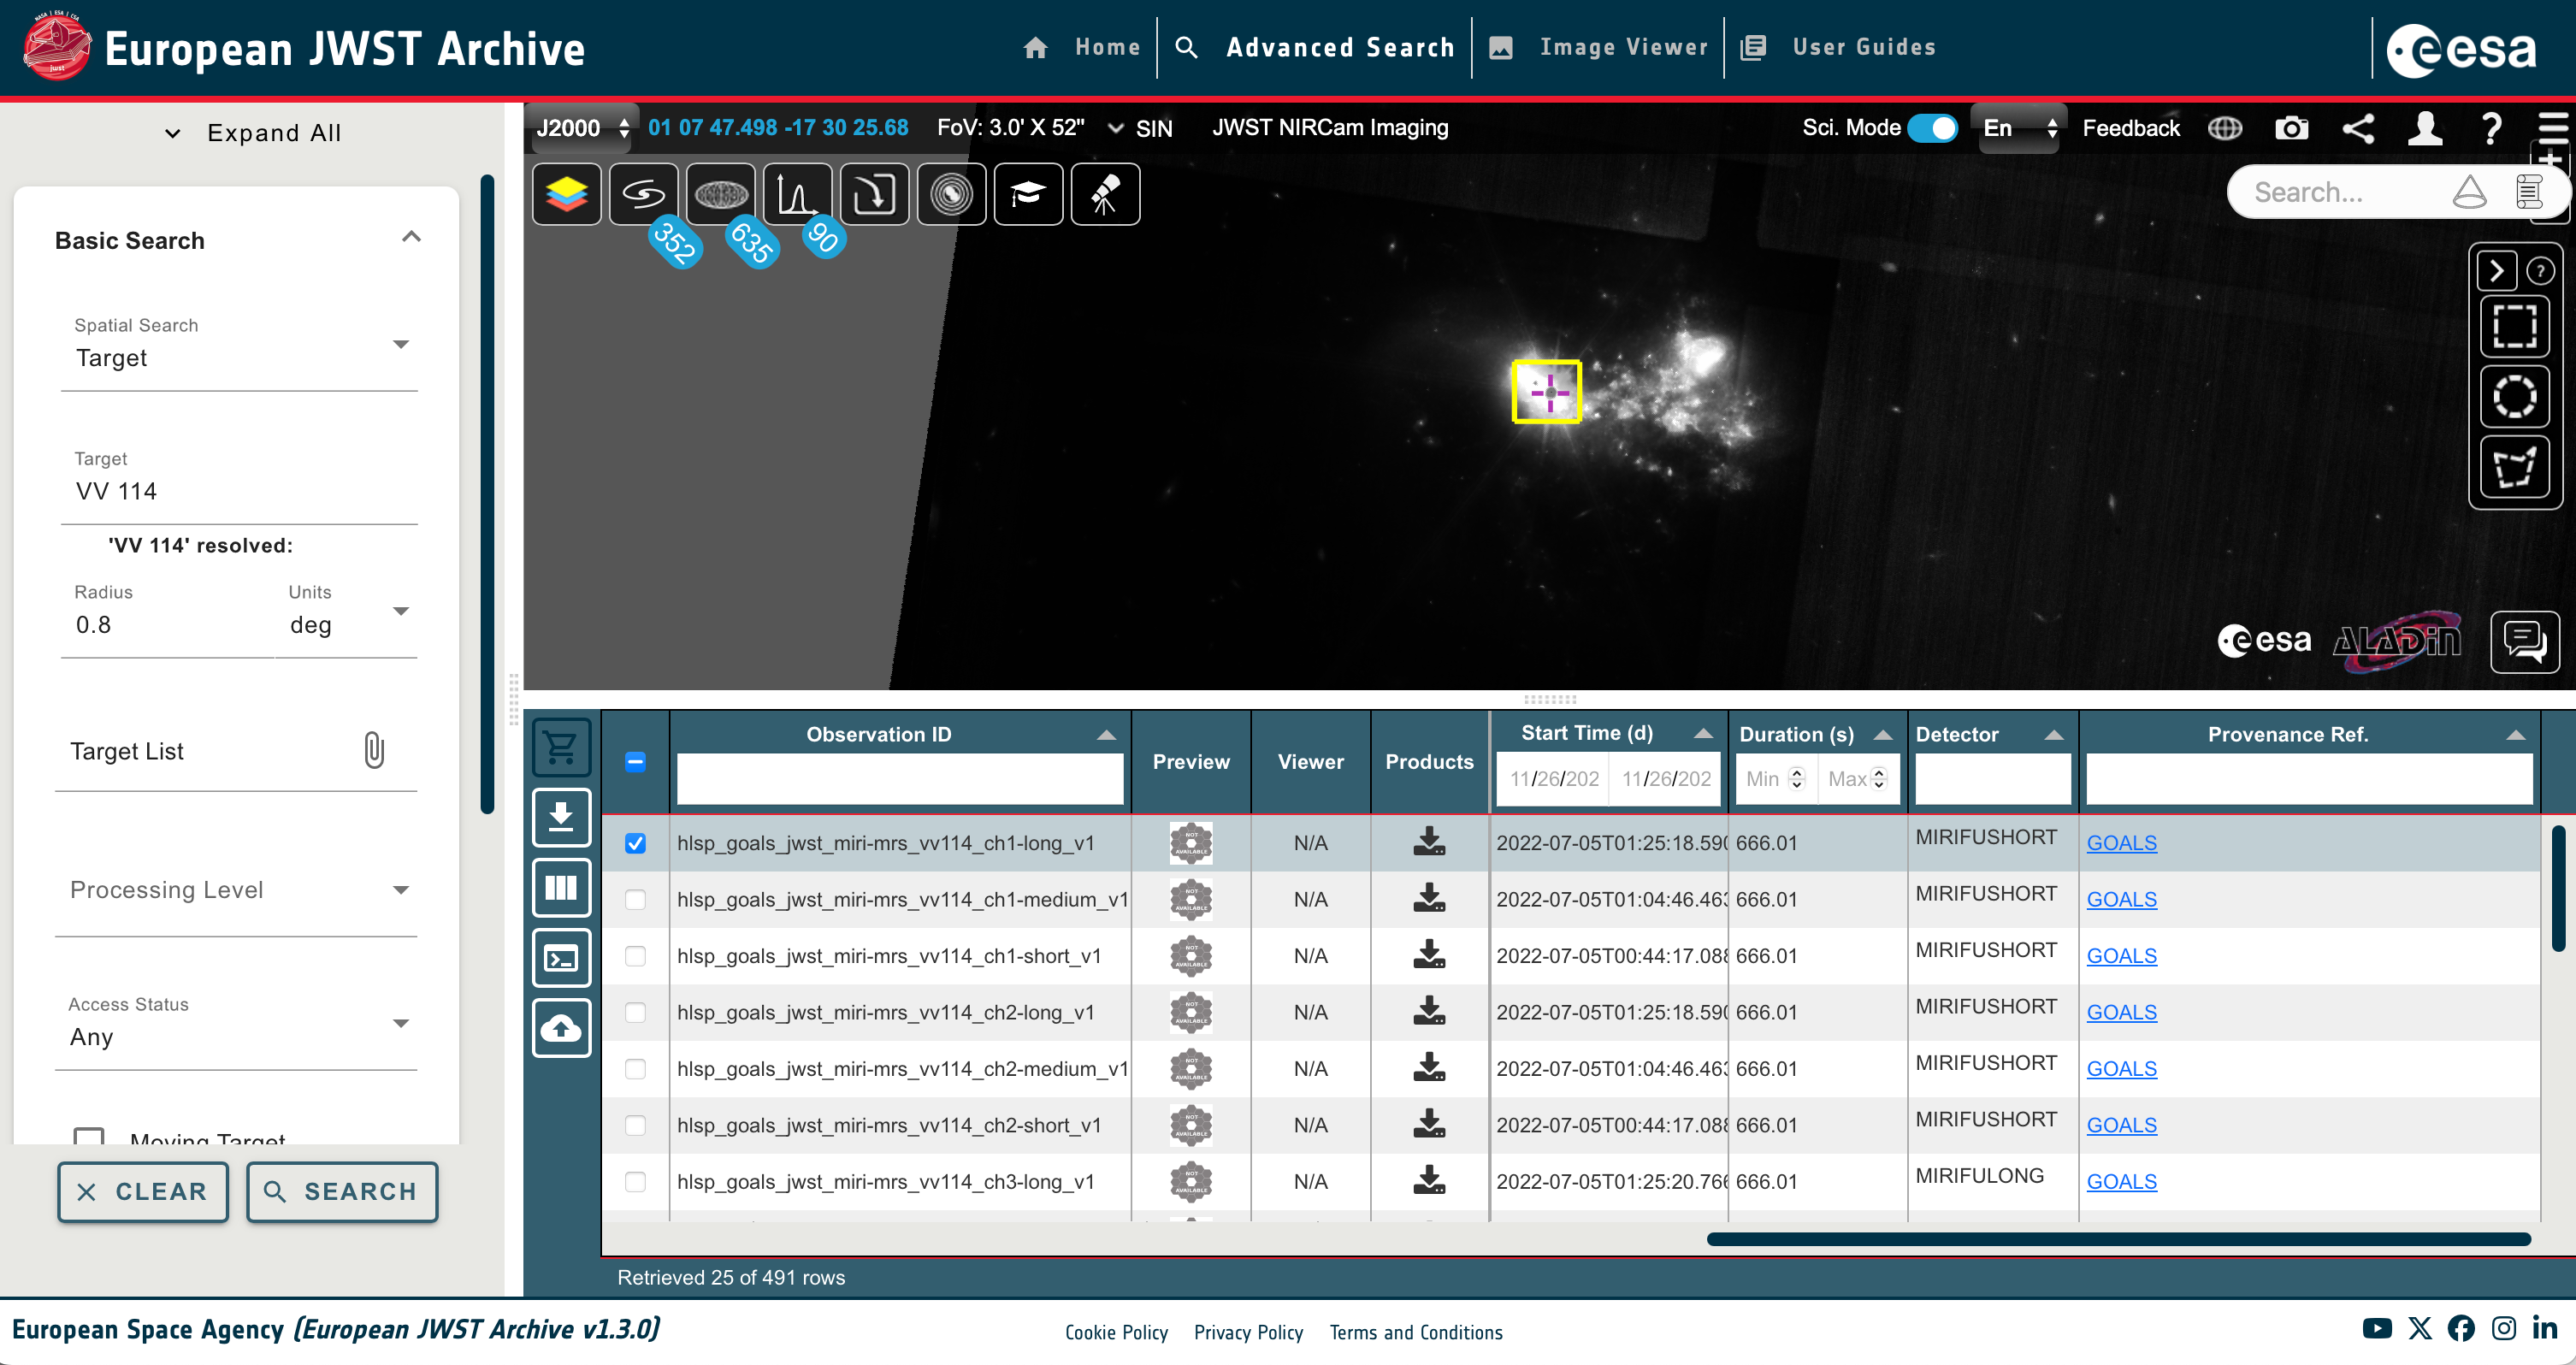

MIRI footprint of GOALS High Level Science Product (HLSP) overlaid on the NIRCam image of VV 114

This image shows the MIRI footprint of GOALS High Level Science Product (HLSP) overlaid on the NIRCam image of VV 114.

Credit: eJWST